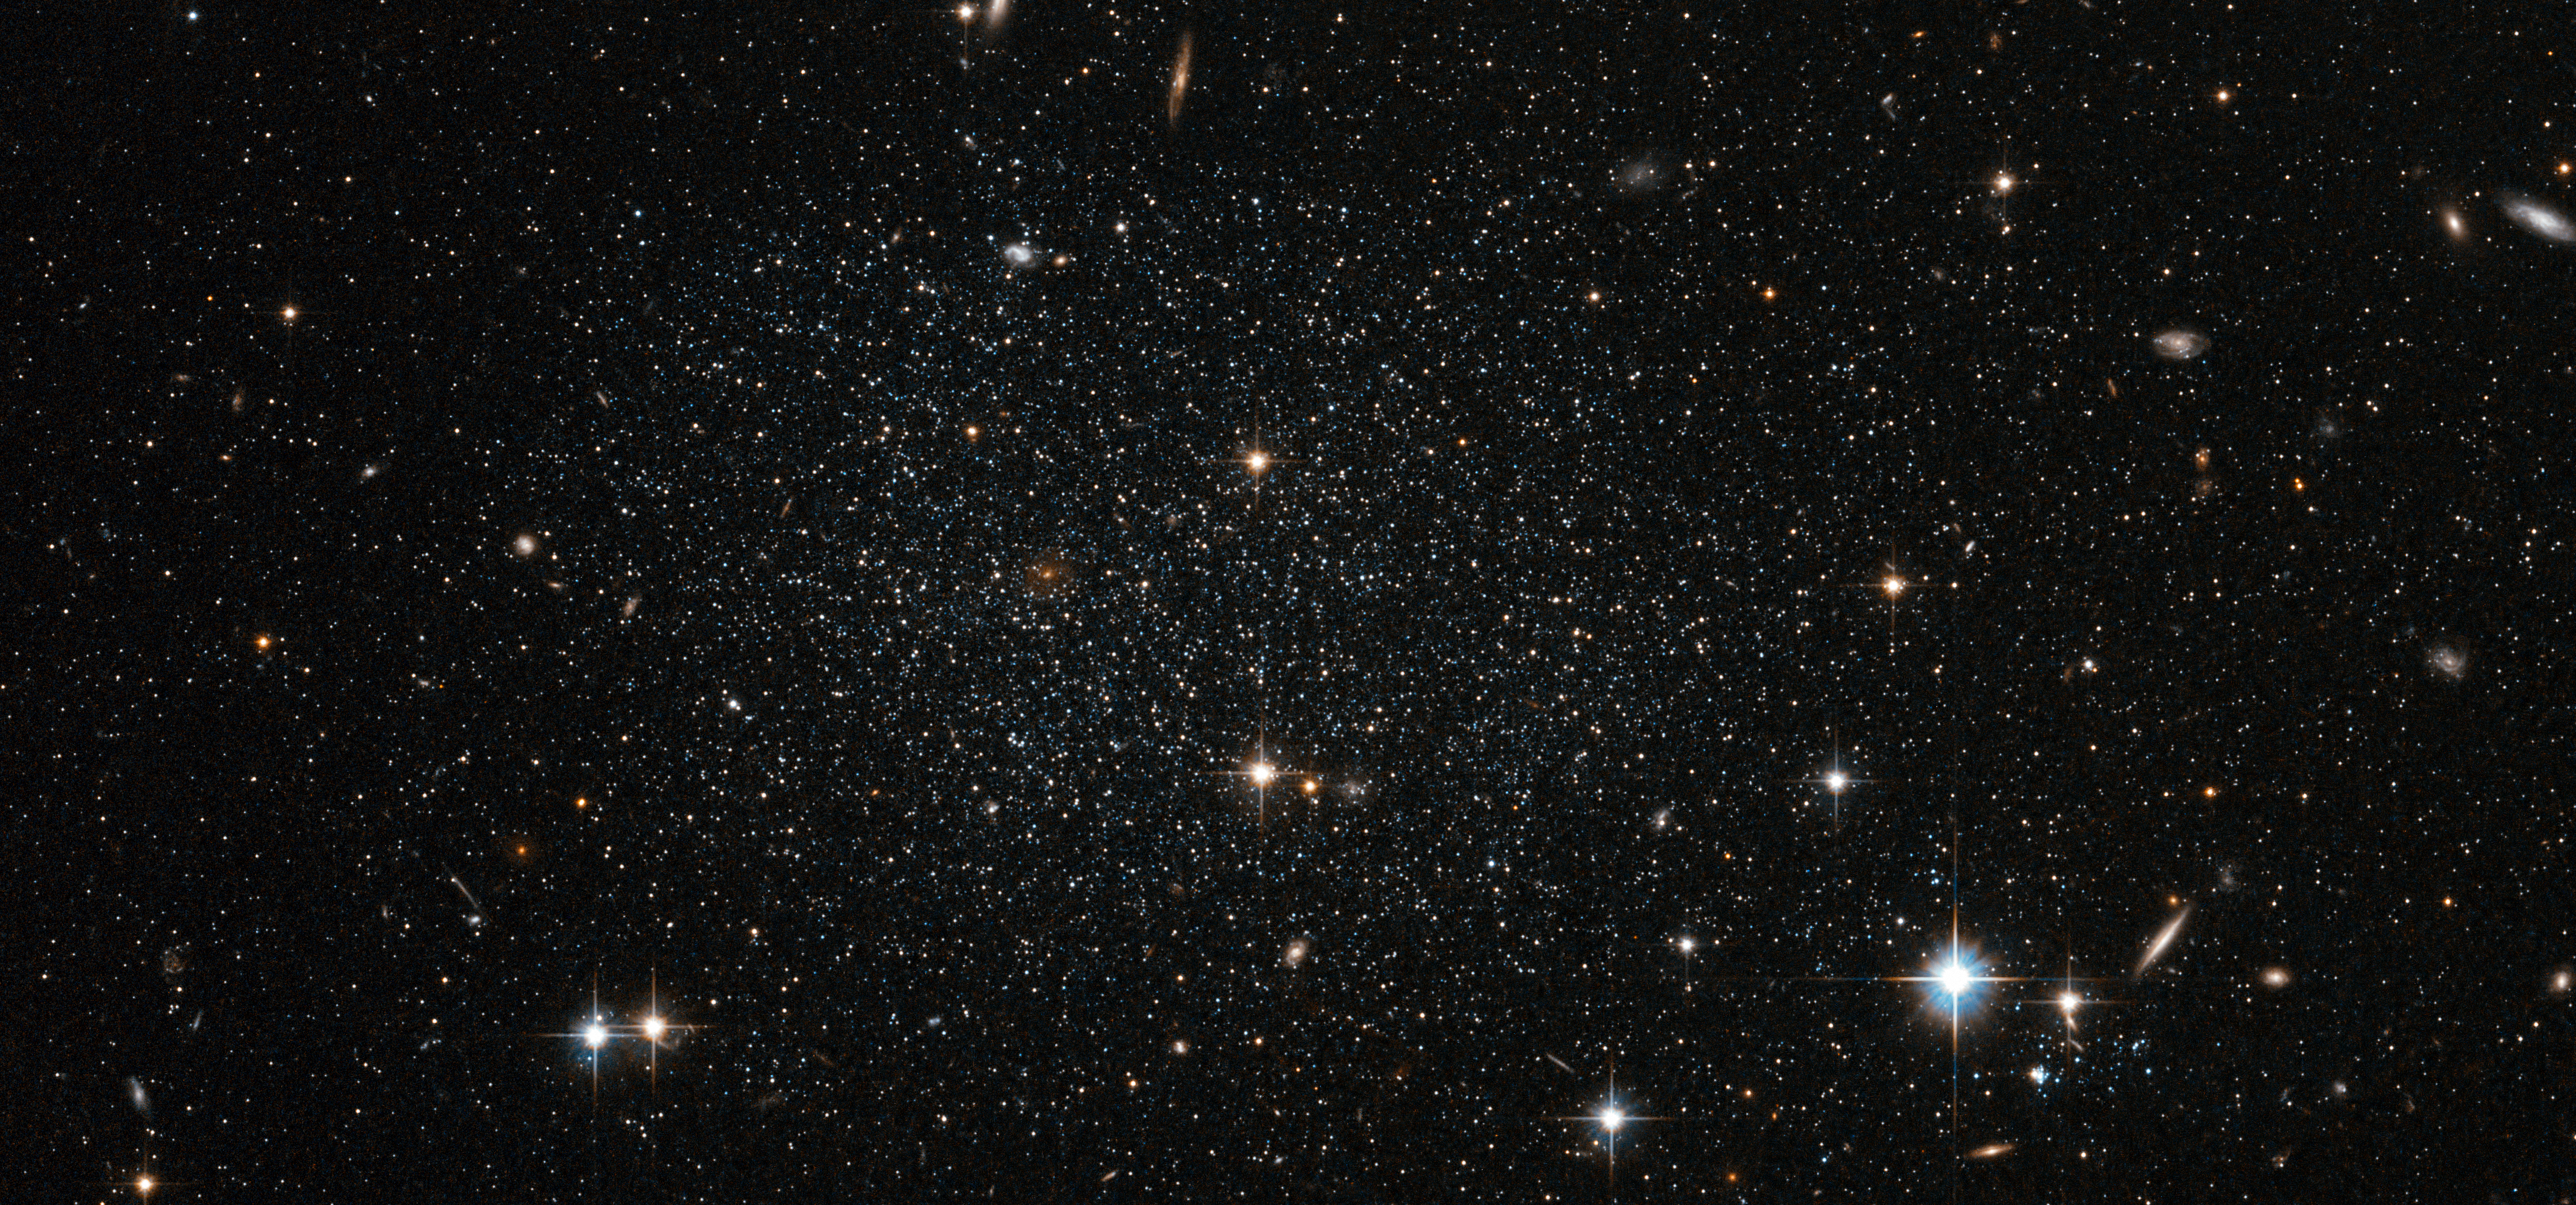

Antlia dwarf galaxy peppers the sky with stars

The myriad faint stars that comprise the Antlia Dwarf galaxy are more than four million light-years from Earth, but this NASA/ESA Hubble Space Telescope image offers such clarity that they could be mistaken for much closer stars in our own Milky Way. This very faint and sparsely populated small galaxy was only discovered in 1997.

Although small, the Antlia Dwarf is a dynamic site featuring stars at many different stages of evolution, from young to old. The freshest stars are only found in the central regions where there is significant ongoing star formation. Older stars and globular clusters are found in the outer areas.

It is not entirely clear whether the Antlia Dwarf is a member our galactic neighbourhood, called the Local Group. It probably lies just beyond the normally accepted outer limits of the group. Although it is fairly isolated, some believe it has interacted with other star groups. Evidence comes from galaxy NGC 3109, close to the Antlia Dwarf (but not visible in this image). Both galaxies feature rifts of stars moving at comparable velocities; a telltale sign that they were gravitationally linked at some point in the past.

This picture was created from observations in visible and infrared light taken with the Wide Field Channel of Hubble’s Advanced Camera for Surveys. The field of view is approximately 3.2 by 1.5 arcminutes.

Credit: ESA/Hubble & NASA